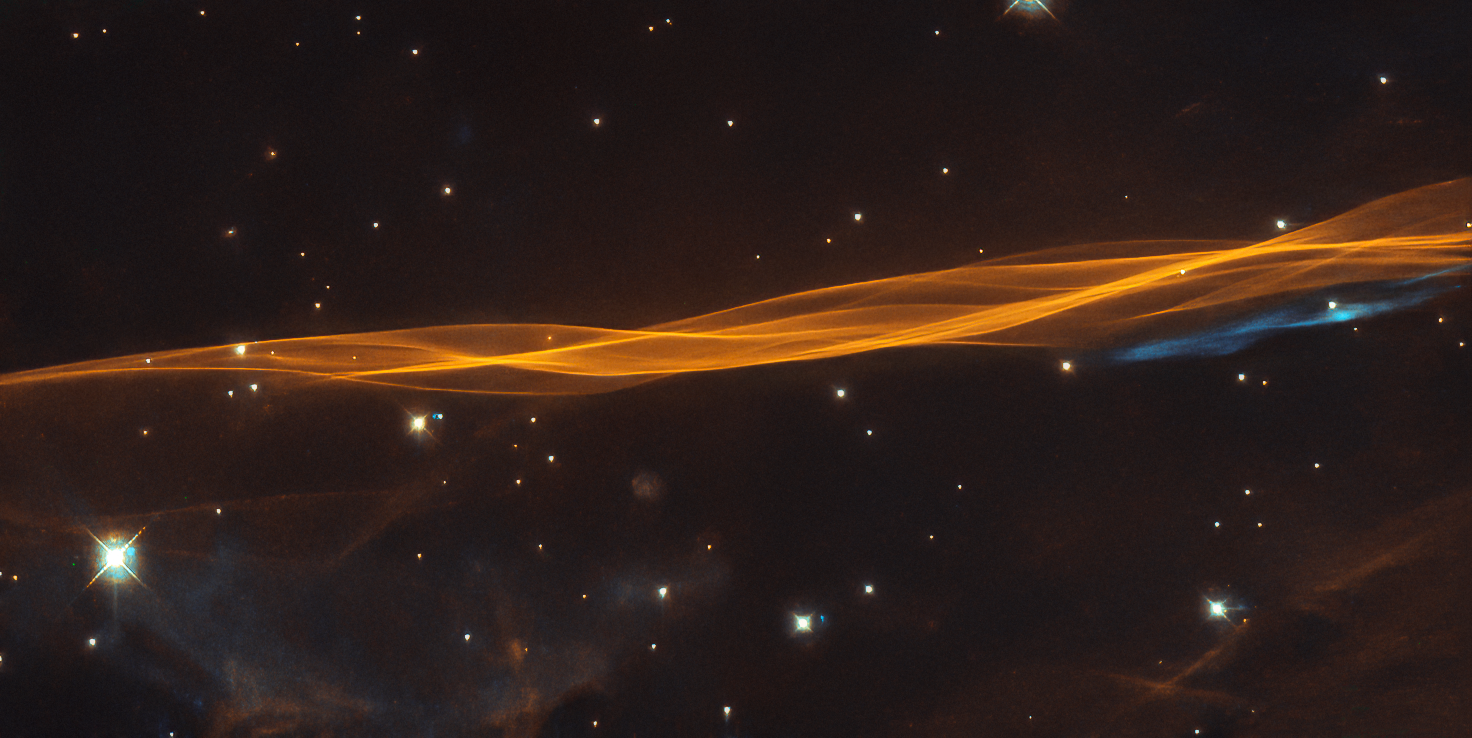

At the Edge of the Blast

While appearing as a delicate and light veil draped across the sky, this image from the NASA/ESA Hubble Space Telescope actually depicts a small section of the Cygnus supernova blast wave, located around 2400 light-years away. The name of the supernova remnant comes from its position in the northern constellation of Cygnus (The Swan), where it covers an area 36 times larger than the full moon.

The original supernova explosion blasted apart a dying star about 20 times more massive than our Sun between 10 000 and 20 000 years ago. Since then, the remnant has expanded 60 light-years from its centre. The shockwave marks the outer edge of the supernova remnant and continues to expand at around 350 kilometres per second. The interaction of the ejected material and the low-density interstellar material swept up by the shockwave forms the distinctive veil-like structure seen in this image.

Credit: ESA/Hubble & NASA, W. Blair
Acknowledgement: Leo Shatz